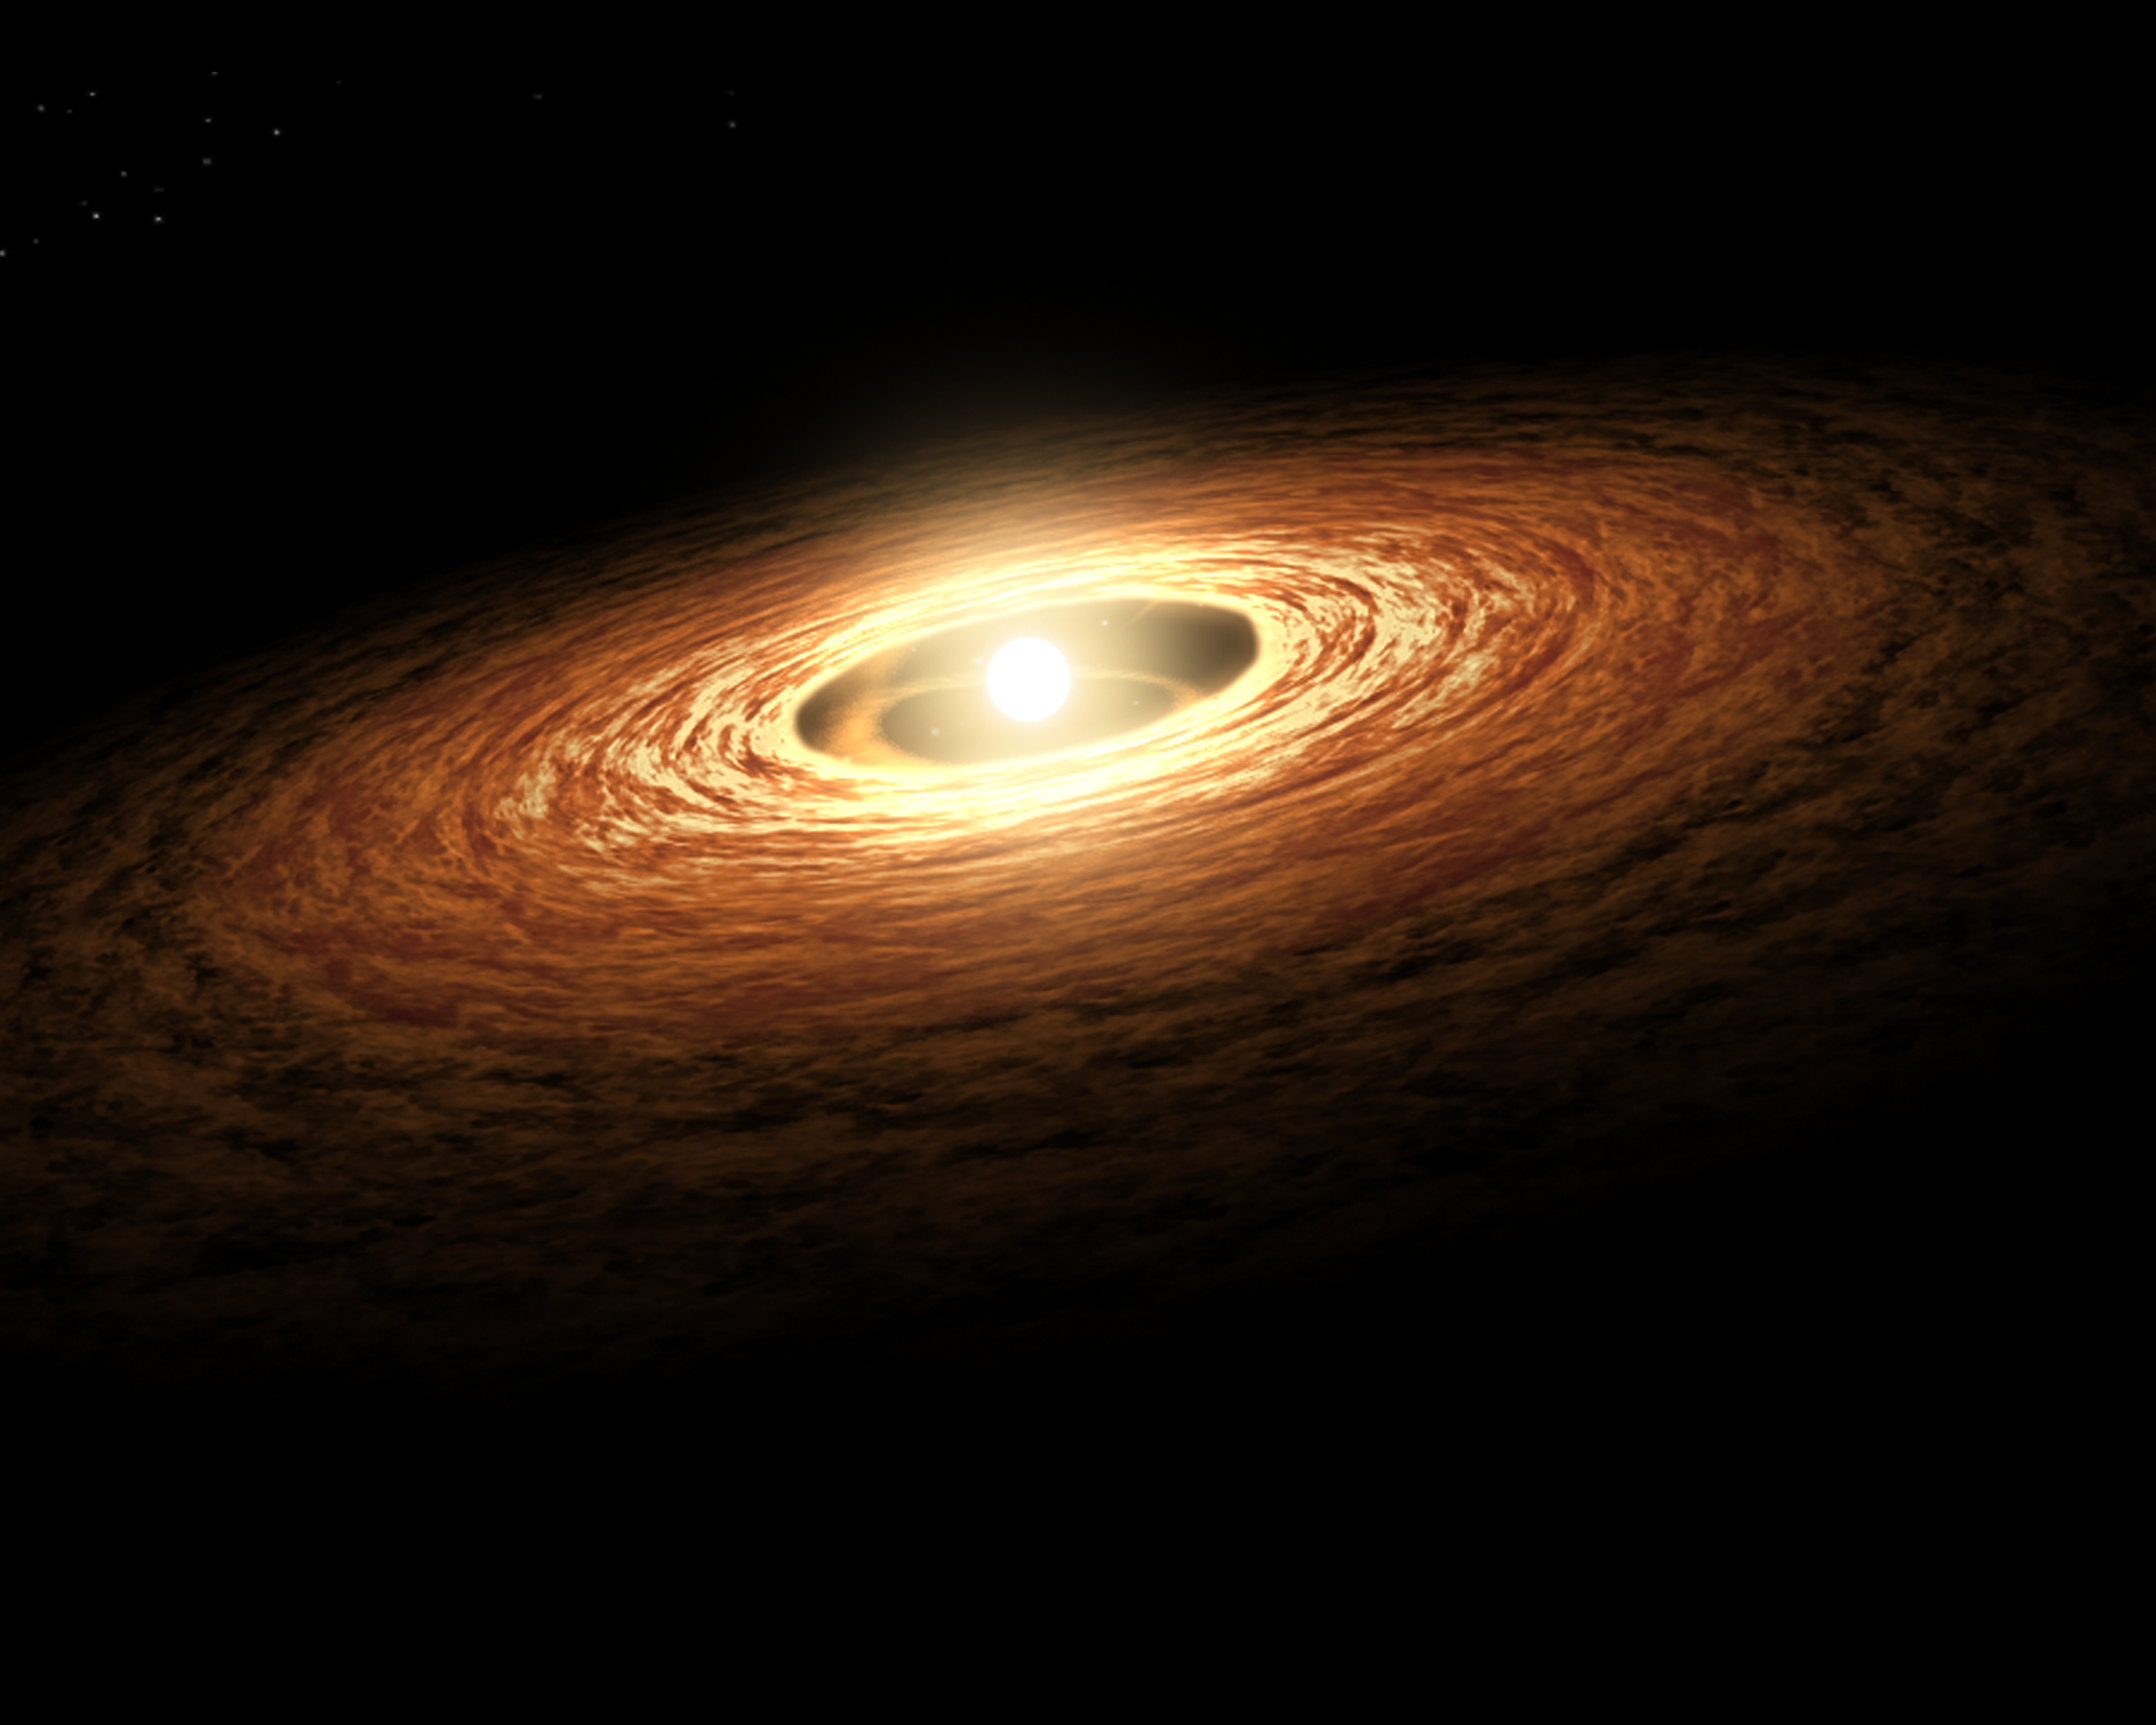

Artist’s impression of protoplanetary disc

This is an artist’s impression of a young star surrounded by a protoplanetary disc.

An international team of astronomers have used the NASA/ESA/Webb James Webb Space Telescope to study the disc around a young and very low-mass star. The results reveal the richest hydrocarbon chemistry seen to date in a protoplanetary disc (including the first extrasolar detection of ethane) and contribute to our evolving understanding of the diversity of planetary systems.

The science team explored the region around a very low-mass star of 0.11 solar masses (known as ISO-ChaI 147). These observations provide insights into the environment as well as basic ingredients for such planets to form. The team found that the gas in the planet-forming region of the star is rich in carbon. This could potentially be because carbon is removed from the solid material from which rocky planets can form, and could explain why Earth is relatively carbon-poor.

Credit: NASA/JPL-Caltech